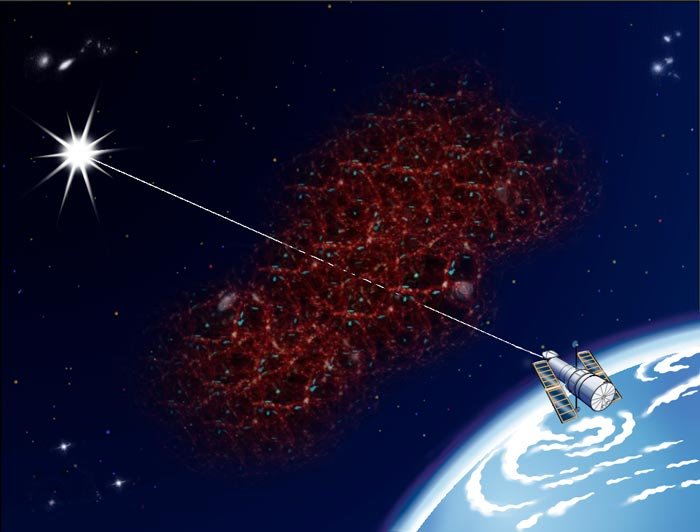

Lost and found: Hubble finds much of the Universe's missing hydrogen

Astronomers detected vast filaments of invisible hydrogen by using the light of a distant quasar (core of active galaxy) to probe the dark space between the galaxies. The Hubble Space Telescope Imaging Spectrograph found the spectral 'fingerprints' of highly ionized intervening oxygen (which is a tracer of the hydrogen) superimposed on the quasar's light. Slicing across billions of light-years of space, the quasar's brilliant beam penetrated at least four separate filaments of the invisible hydrogen laced with the telltale oxygen. This filamentary structure is throughout the universe, all the way out to the distance of the quasar.

For simplification, this graphic isolates the filamentary structure to a specific location along the line of sight to the quasar.

Credit: John Godfrey (STScI)